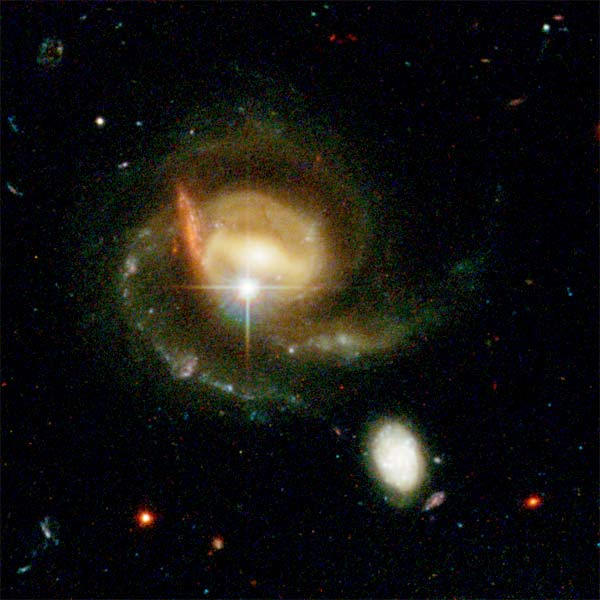

Details from ACS Image of NGC 3370: Upper Left Corner

An unusual concentration in the upper corner shows a complex region of tidal interaction between a bright galaxy and its companion. Superimposed are a foreground star in the Milky Way and a background galaxy.

Credit: NASA/ESA, The Hubble Heritage Team and A. Riess (STScI)